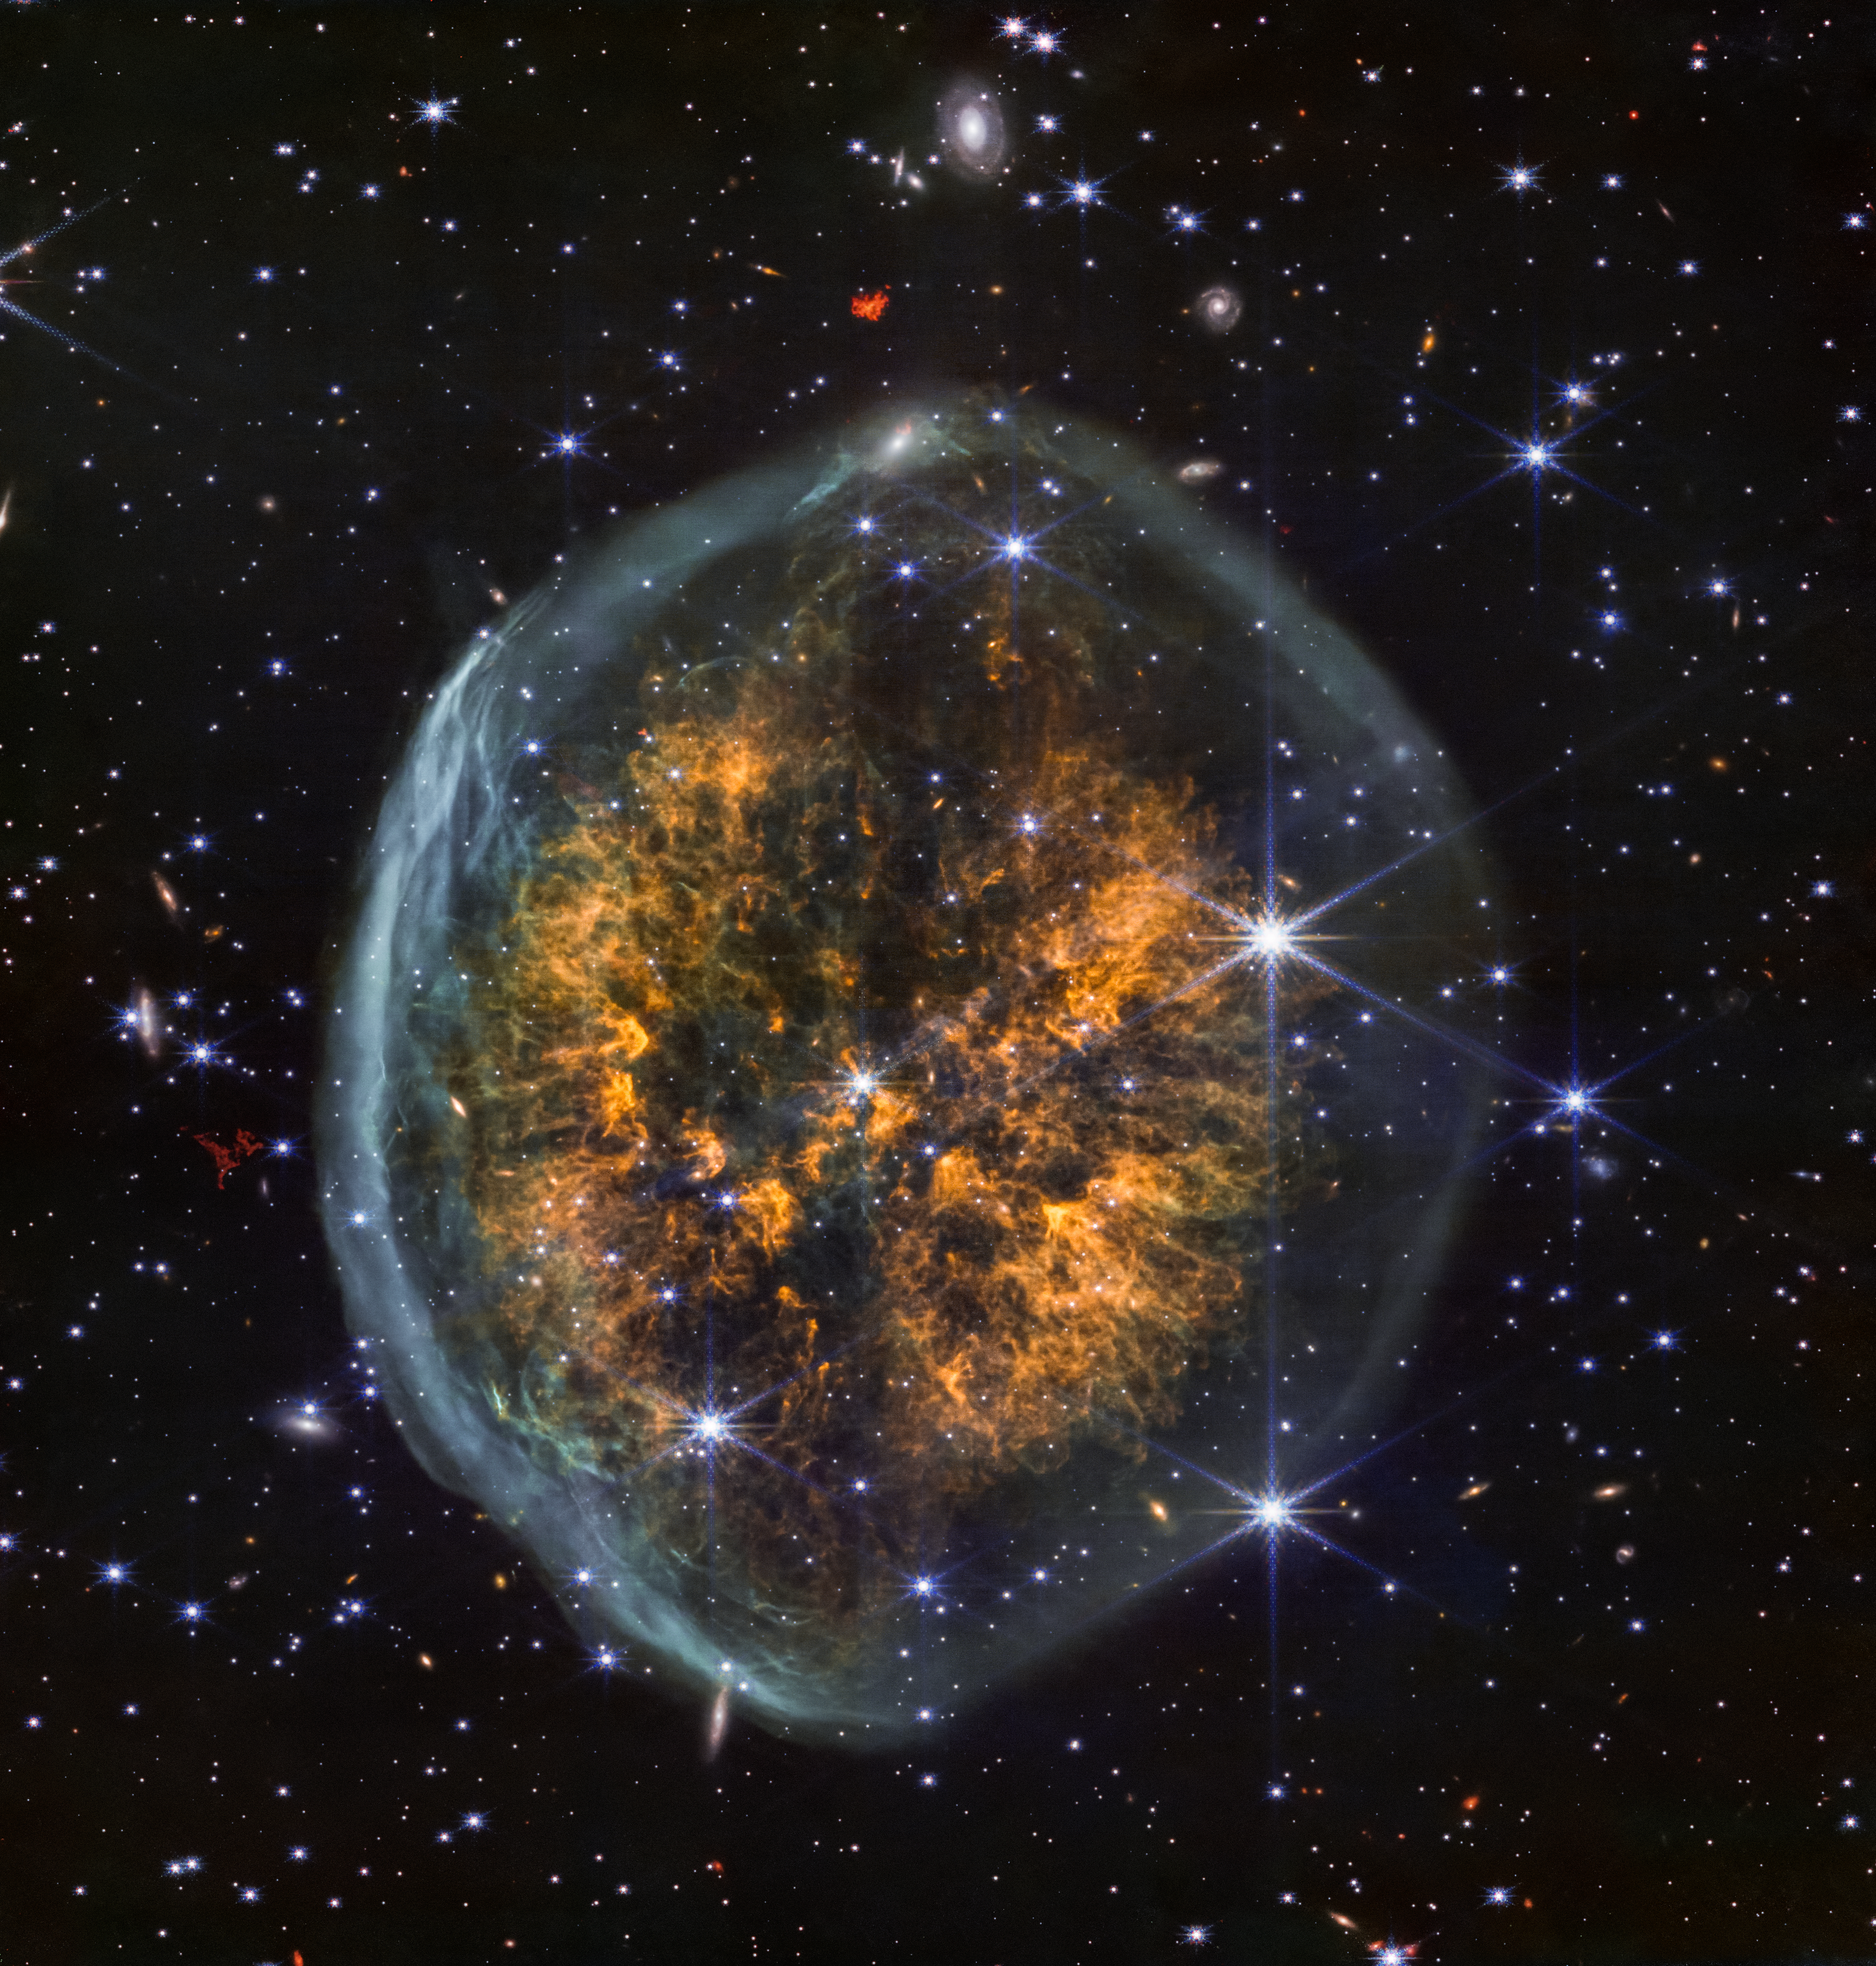

Exposed Cranium Nebula (NIRCam image)

A distinct dark lane between two cosmic clouds adds to the brainy appearance of nebula PMR 1. The NIRCam (Near-Infrared Camera) instrument on the James Webb Space Telescope shows multiple phases of a dying star’s outbursts in one image: the skull-like, whitish outer bubble is from an initial ejection, mostly of hydrogen, followed by other heavier material, shown in orange in the nebula’s interior. As with many NIRCam images, many stars and even distant galaxies can be seen behind the nebula.

Beyond its unusual appearance there is still much to be uncovered about PMR 1. It’s unclear if the star creating the nebula is massive enough to undergo a supernova, or if it will evolve into a dense white dwarf once it has shed all its outer layers.

Credit: NASA, ESA, CSA, STScI, Image Processing: Joseph DePasquale (STScI)